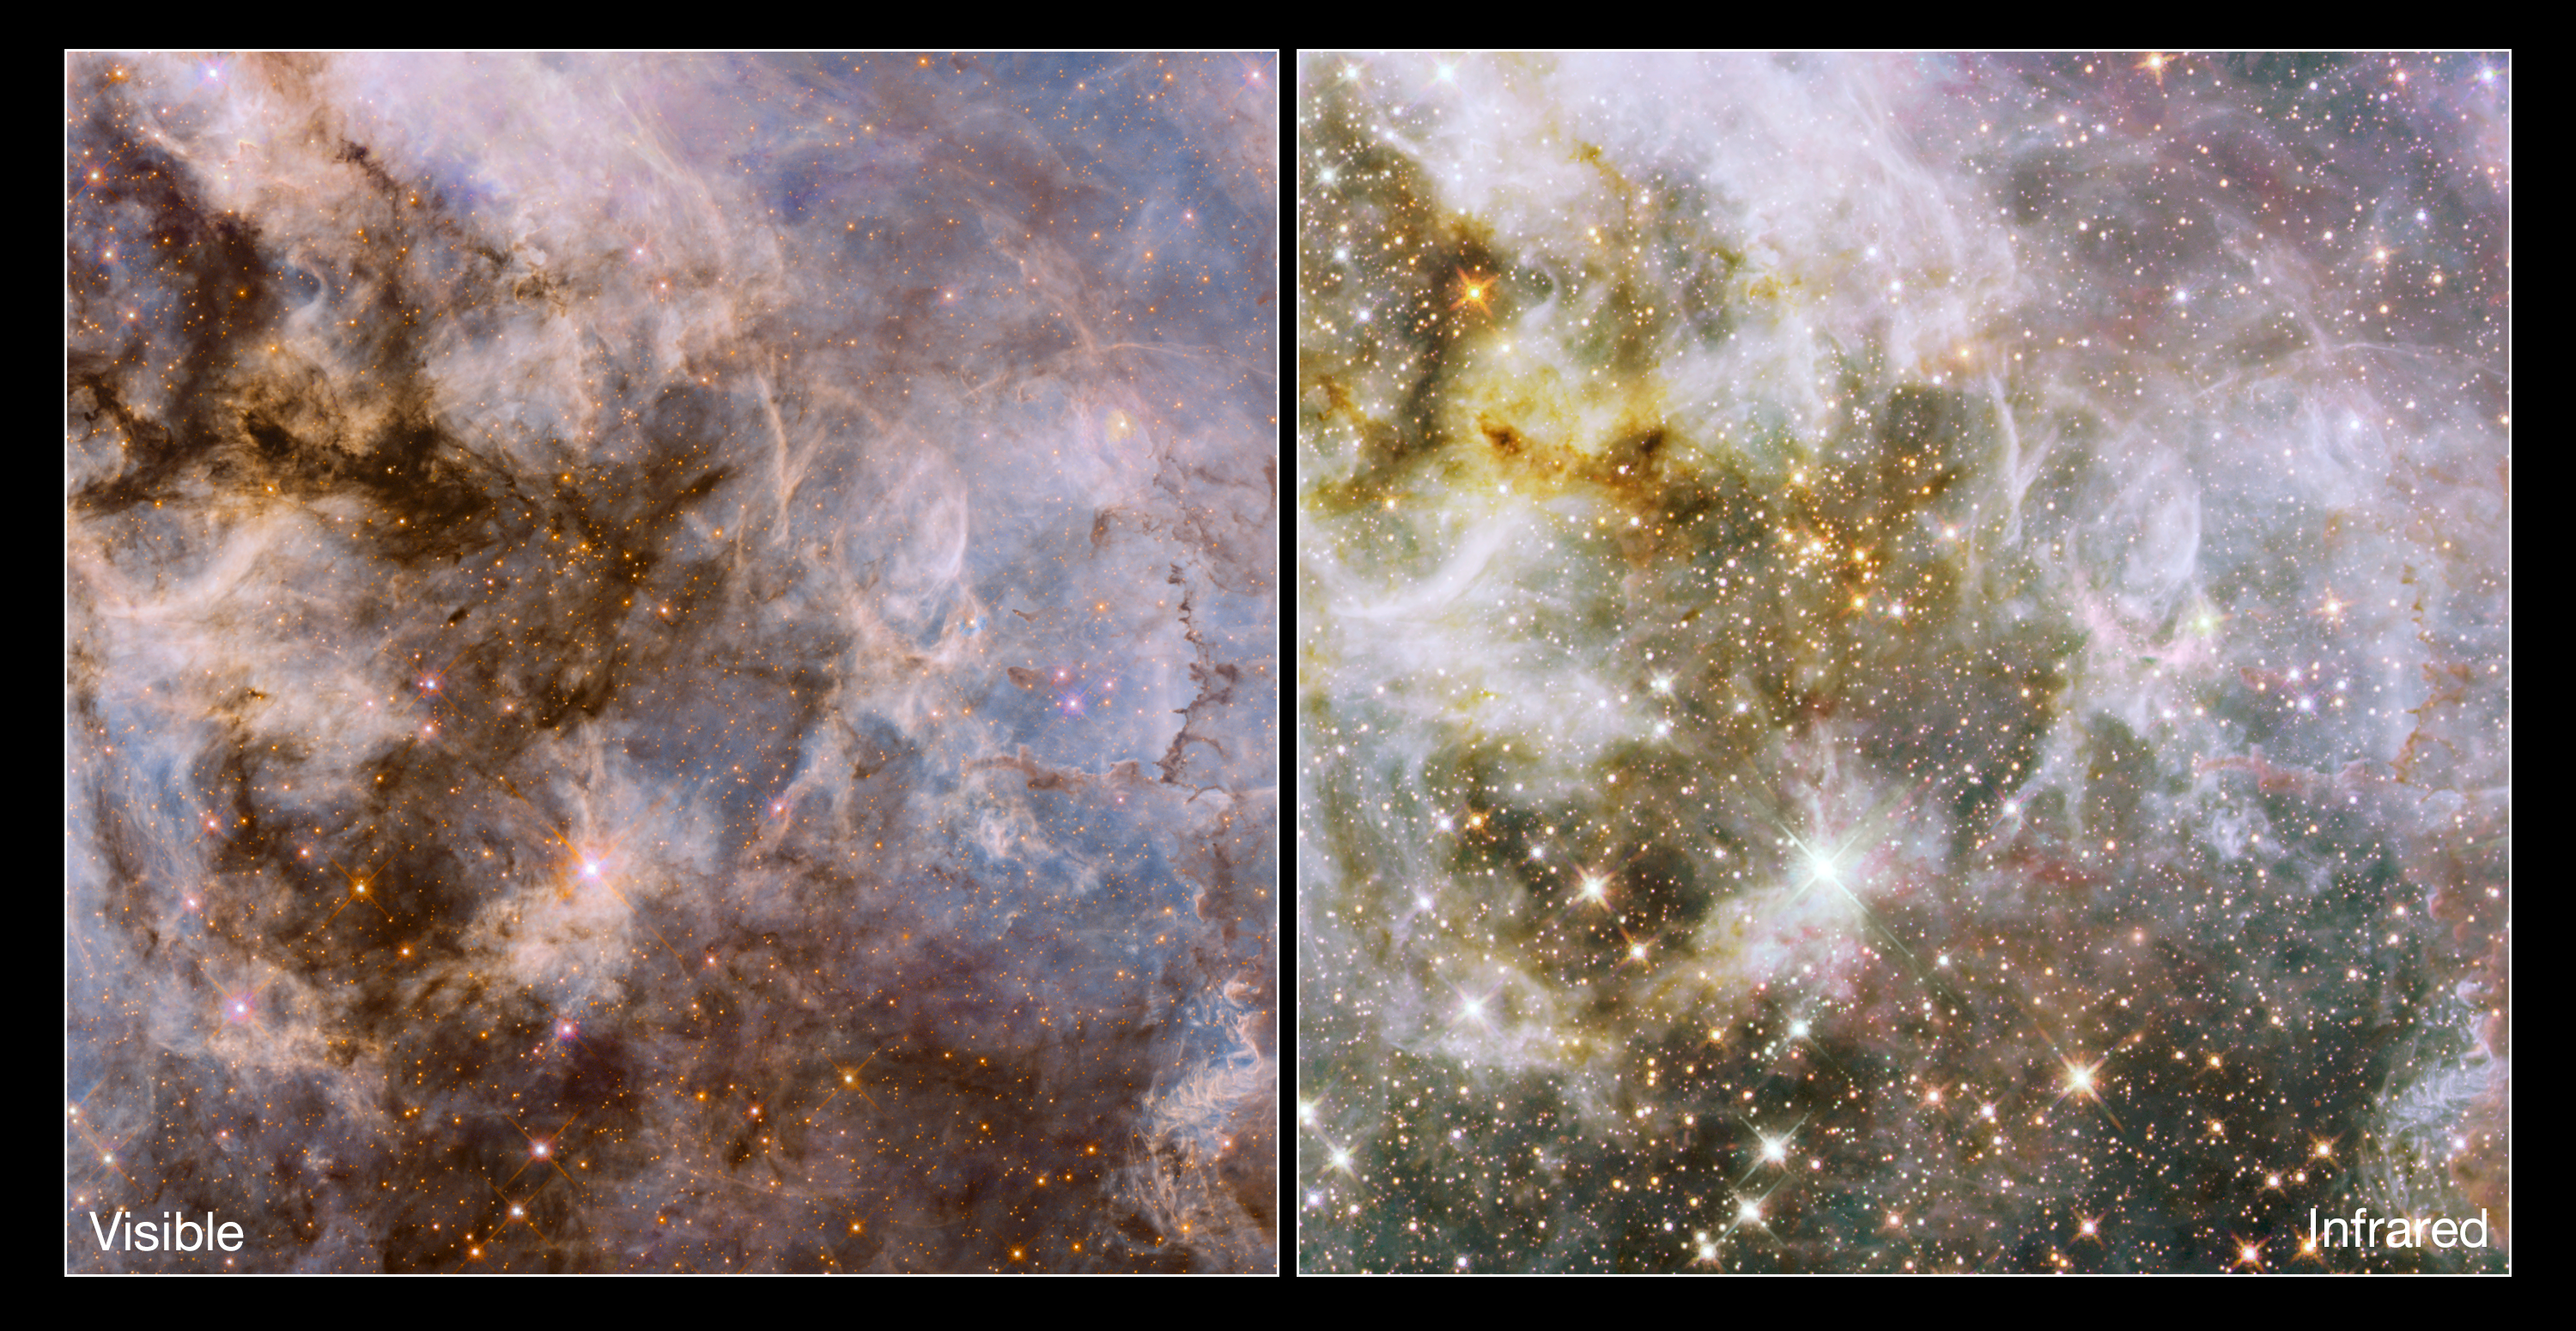

Comparing optical and infrared Hubble views of the Tarantula Nebula

Created using observations taken as part of the Hubble Tarantula Treasury Project (HTTP), these images were snapped using Hubble's Wide Field Camera 3 (WFC3) and Advanced Camera for Surveys (ACS). The Hubble Tarantula Treasury Project (HTTP) is scanning and imaging many of the many millions of stars within the Tarantula, mapping out the locations and properties of the nebula's stellar inhabitants. These observations will help astronomers to piece together an understanding of the nebula's skeleton, viewing its starry structure.

Credit: NASA, ESA, E. Sabbi (STScI)